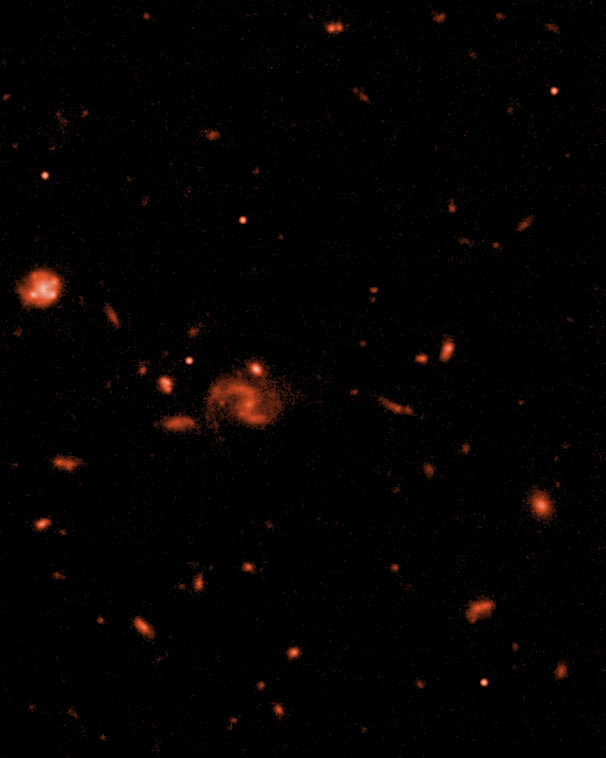

ACS Z-band

NASA's Servicing Mission 3B for the Hubble Space Telescope will give the orbiting observatory a new camera that will significantly increase Hubble's abilities and enable a broad array of new astronomical discoveries. The Advanced Camera for Surveys (ACS) covers twice the area, has twice the sharpness, and is up to five times more sensitive to light than Hubble's workhorse camera, the Wide Field and Planetary Camera 2. The servicing mission will begin on Feb. 28 with the launch of the space shuttle Columbia. The simulated image above depicts how the cosmos will look through the 'eyes' of the ACS (Z-band).

Credit: NASA & ESA